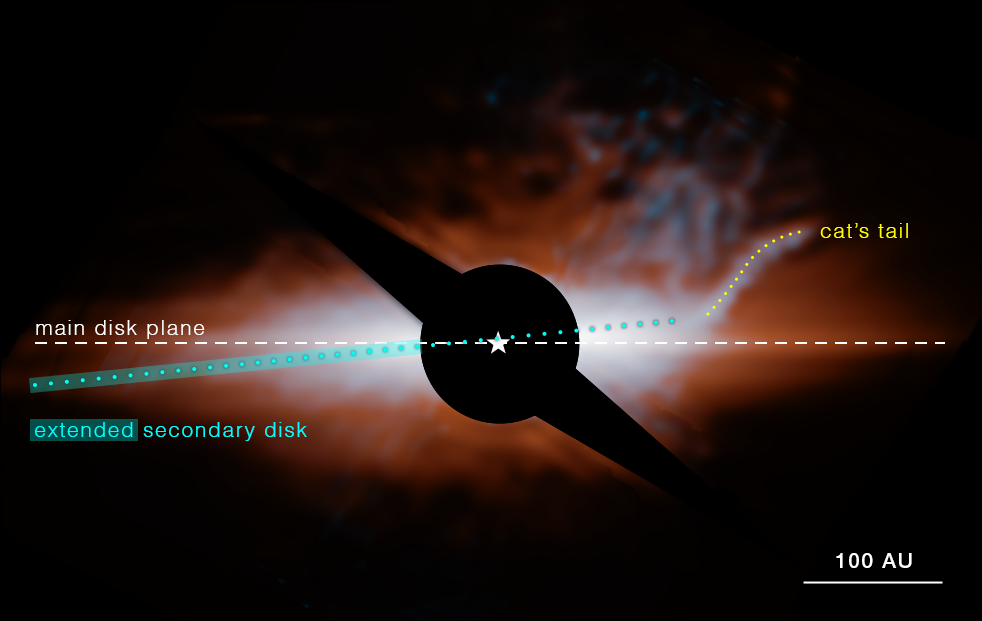

Star system Beta Pictoris (MIRI image, annotated)

This image from Webb’s MIRI (Mid-Infrared Instrument) shows the star system Beta Pictoris. An edge-on disc of dusty debris generated by collisions between planetesimals (orange) dominates the view. A hotter, secondary disc (cyan) is inclined by about 5 degrees relative to the primary disc. The curved feature at upper right, which the science team nicknamed the “cat’s tail,” has never been seen before. A coronagraph (black circle and bar) has been used to block the light of the central star, whose location is marked with a white star shape. In this image light at 15.5 microns is coloured cyan and 23 microns is orange (filters F1550C and F2300C, respectively).

Credit: NASA, ESA, CSA, STScI, C. Stark and K. Lawson (NASA GSFC), J. Kammerer (ESO), and M. Perrin (STScI).